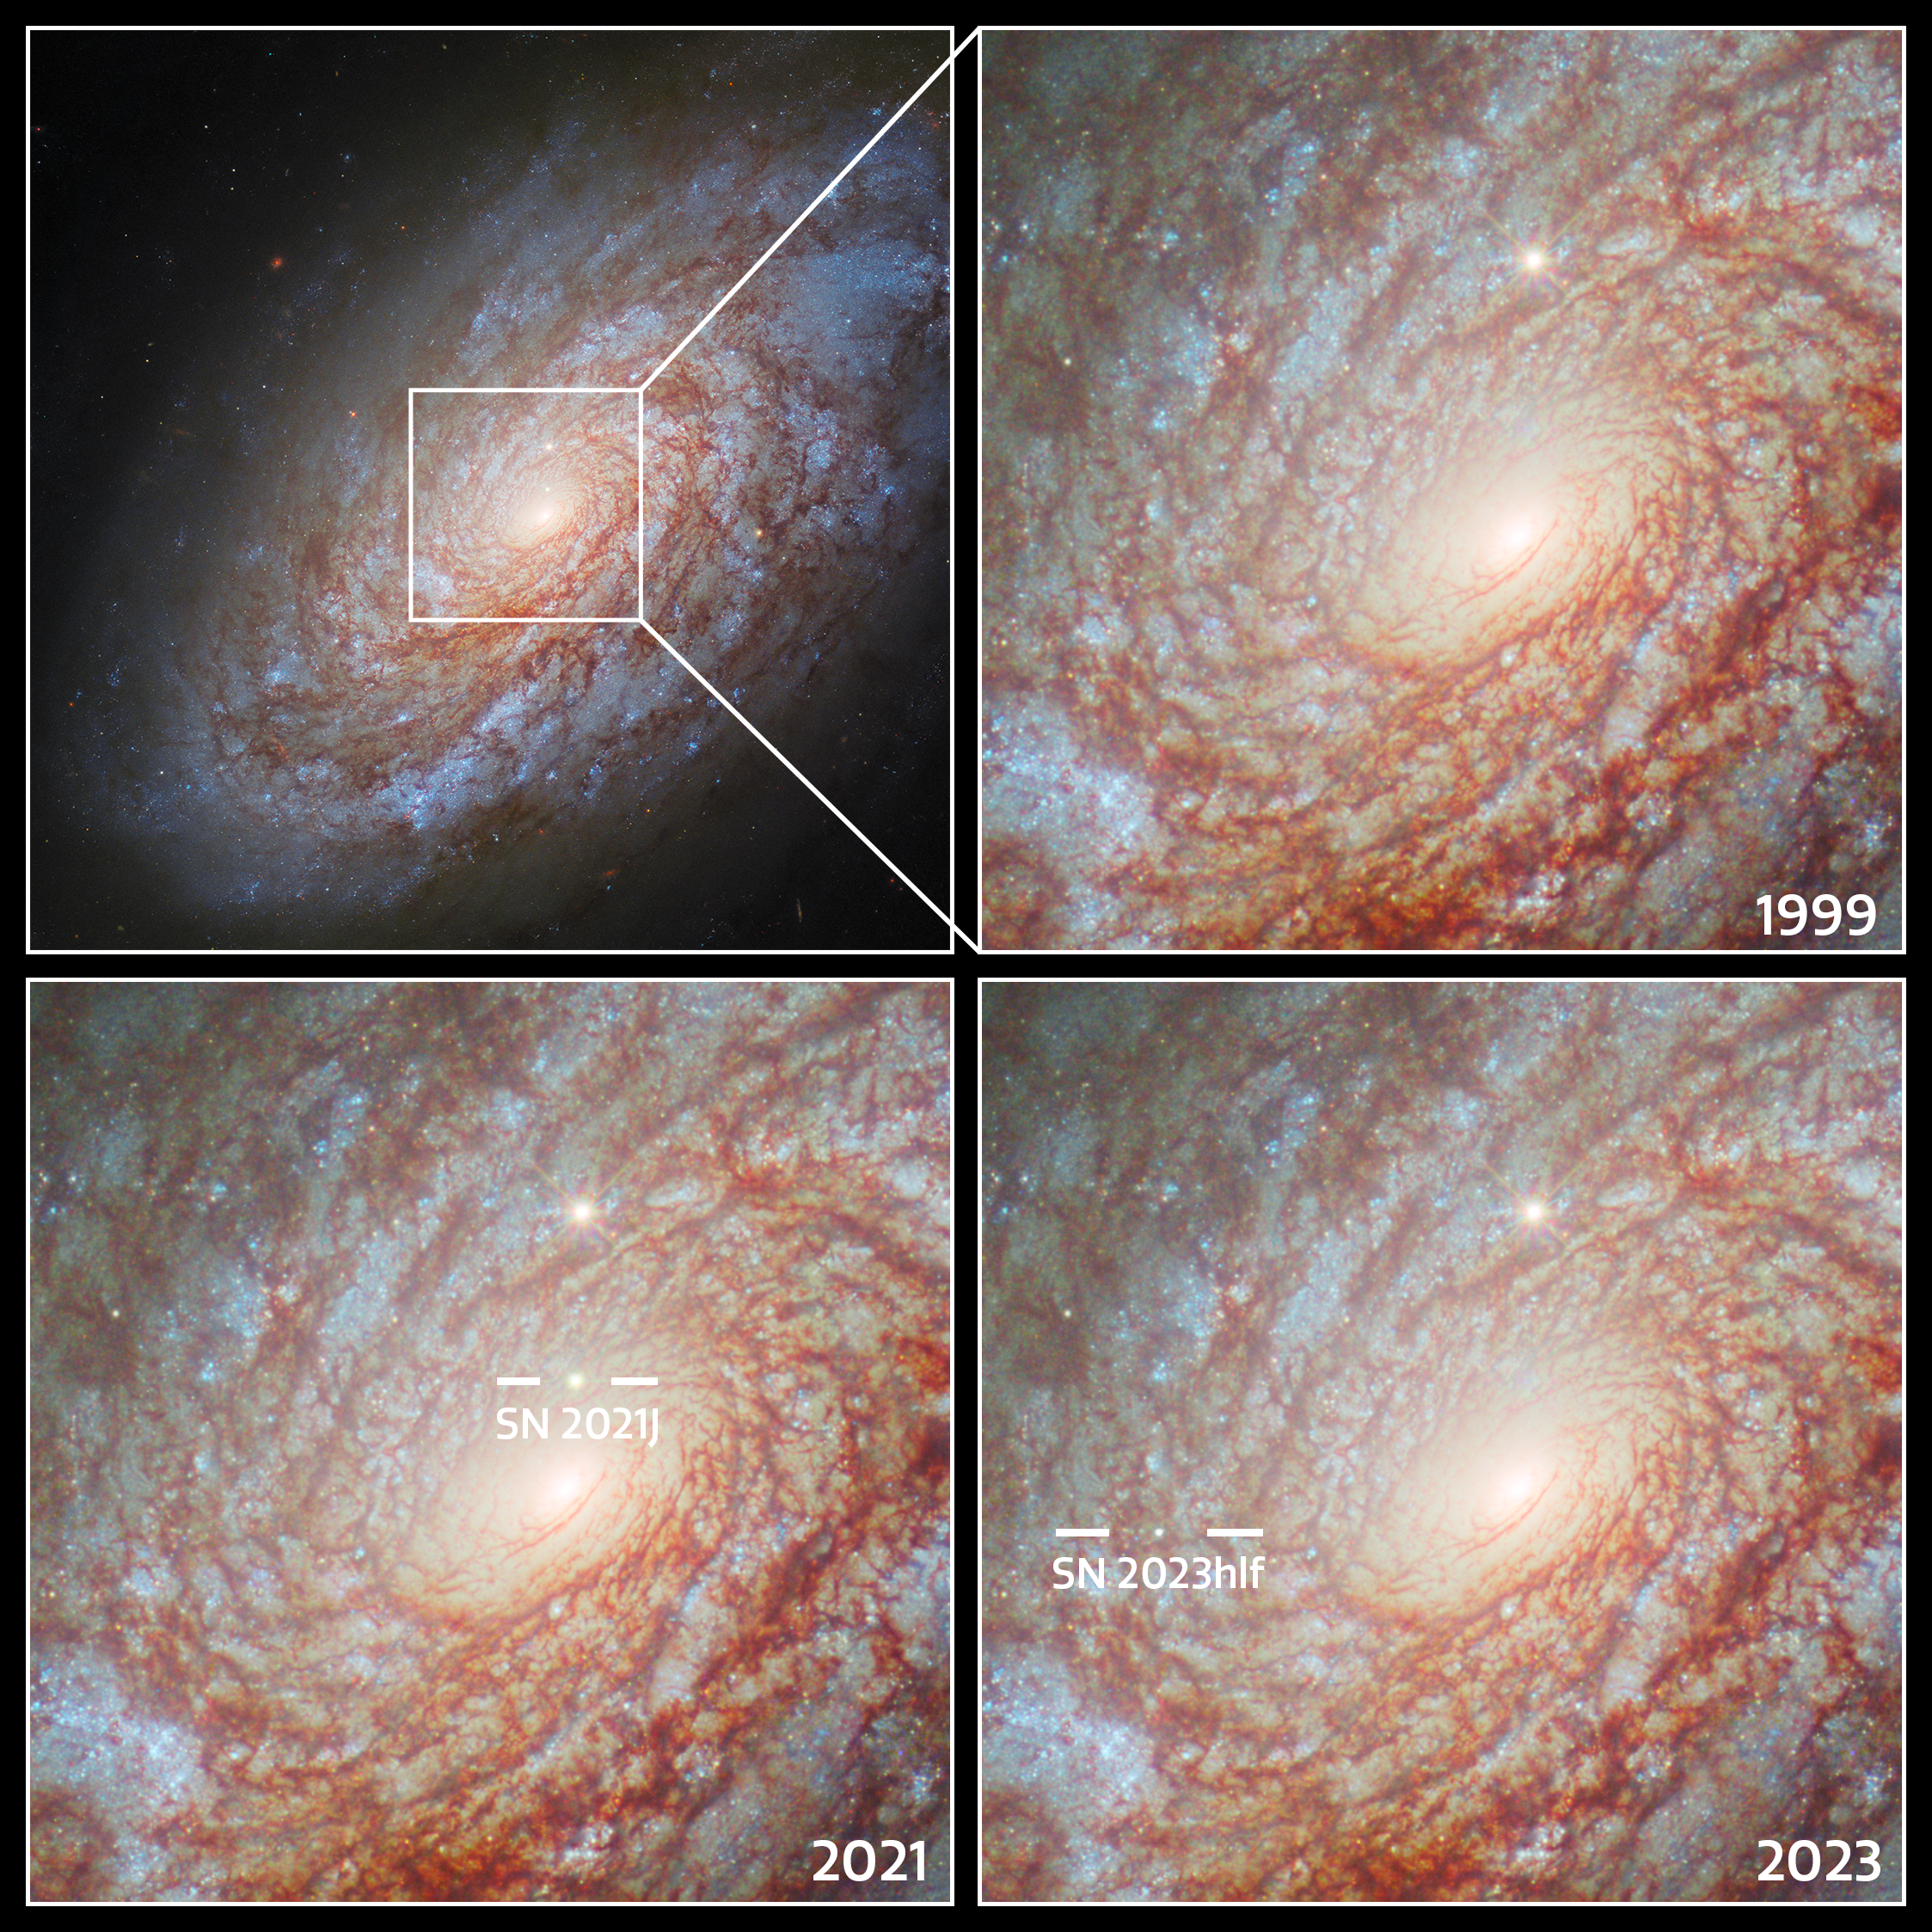

Supernovae in NGC 4414

This collage features the supernovae observed by the NASA/ESA Hubble Space Telescope in the unbarred spiral galaxy NGC 4414, roughly 51 million light-years away from Earth in the constellation Coma Berenices.

You can see an old image of NGC 4414 that features Hubble data from 1995 and 1999 here, which was captured as one of the telescope’s primary missions to determine the distance to galaxies. This was achieved as part of an ongoing research effort to study Cepheid variable stars. Cepheids are a special type of variable star with very stable and predictable brightness variations. The period of these variations depends on physical properties of the stars such as their mass and true brightness. This means that astronomers, just by looking at the variability of their light, can find out about the Cepheids' physical nature, which then can be used very effectively to determine their distance. For this reason cosmologists call Cepheids 'standard candles'.

Astronomers have used Hubble to observe Cepheids, like those that reside in NGC 4414, with extraordinary results. The Cepheids have then been used as stepping-stones to make distance measurements for supernovae, which have, in turn, given a measure for the scale of the Universe. Today we know the age of the Universe to a much higher precision than before Hubble: around 13.7 billion years.

The full view of NGC 4414 can be seen here.

Credit: ESA/Hubble & NASA, O. Graur, S. W. Jha, A. Filippenko